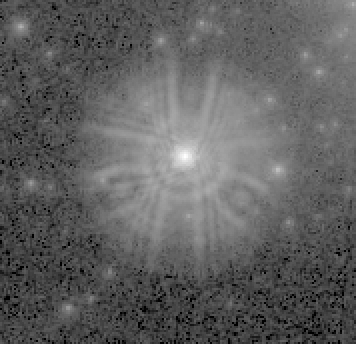

Melnick 34

Melnick 34 as imaged by the first Wide Field and Planetary Camera (WFPC-1). The advantages of working in space above Earth's distorting atmosphere are immediately apparent. Atmospheric blurring is gone and many more stars are visible.

However, the effects of the Hubble Telescope's spherical aberration also are apparent. In particular there is a four arc second diameter 'skirt' around the bright star which obscures the view of the sky in its vicinity.

Credit: NASA, ESA and the COSTAR Team